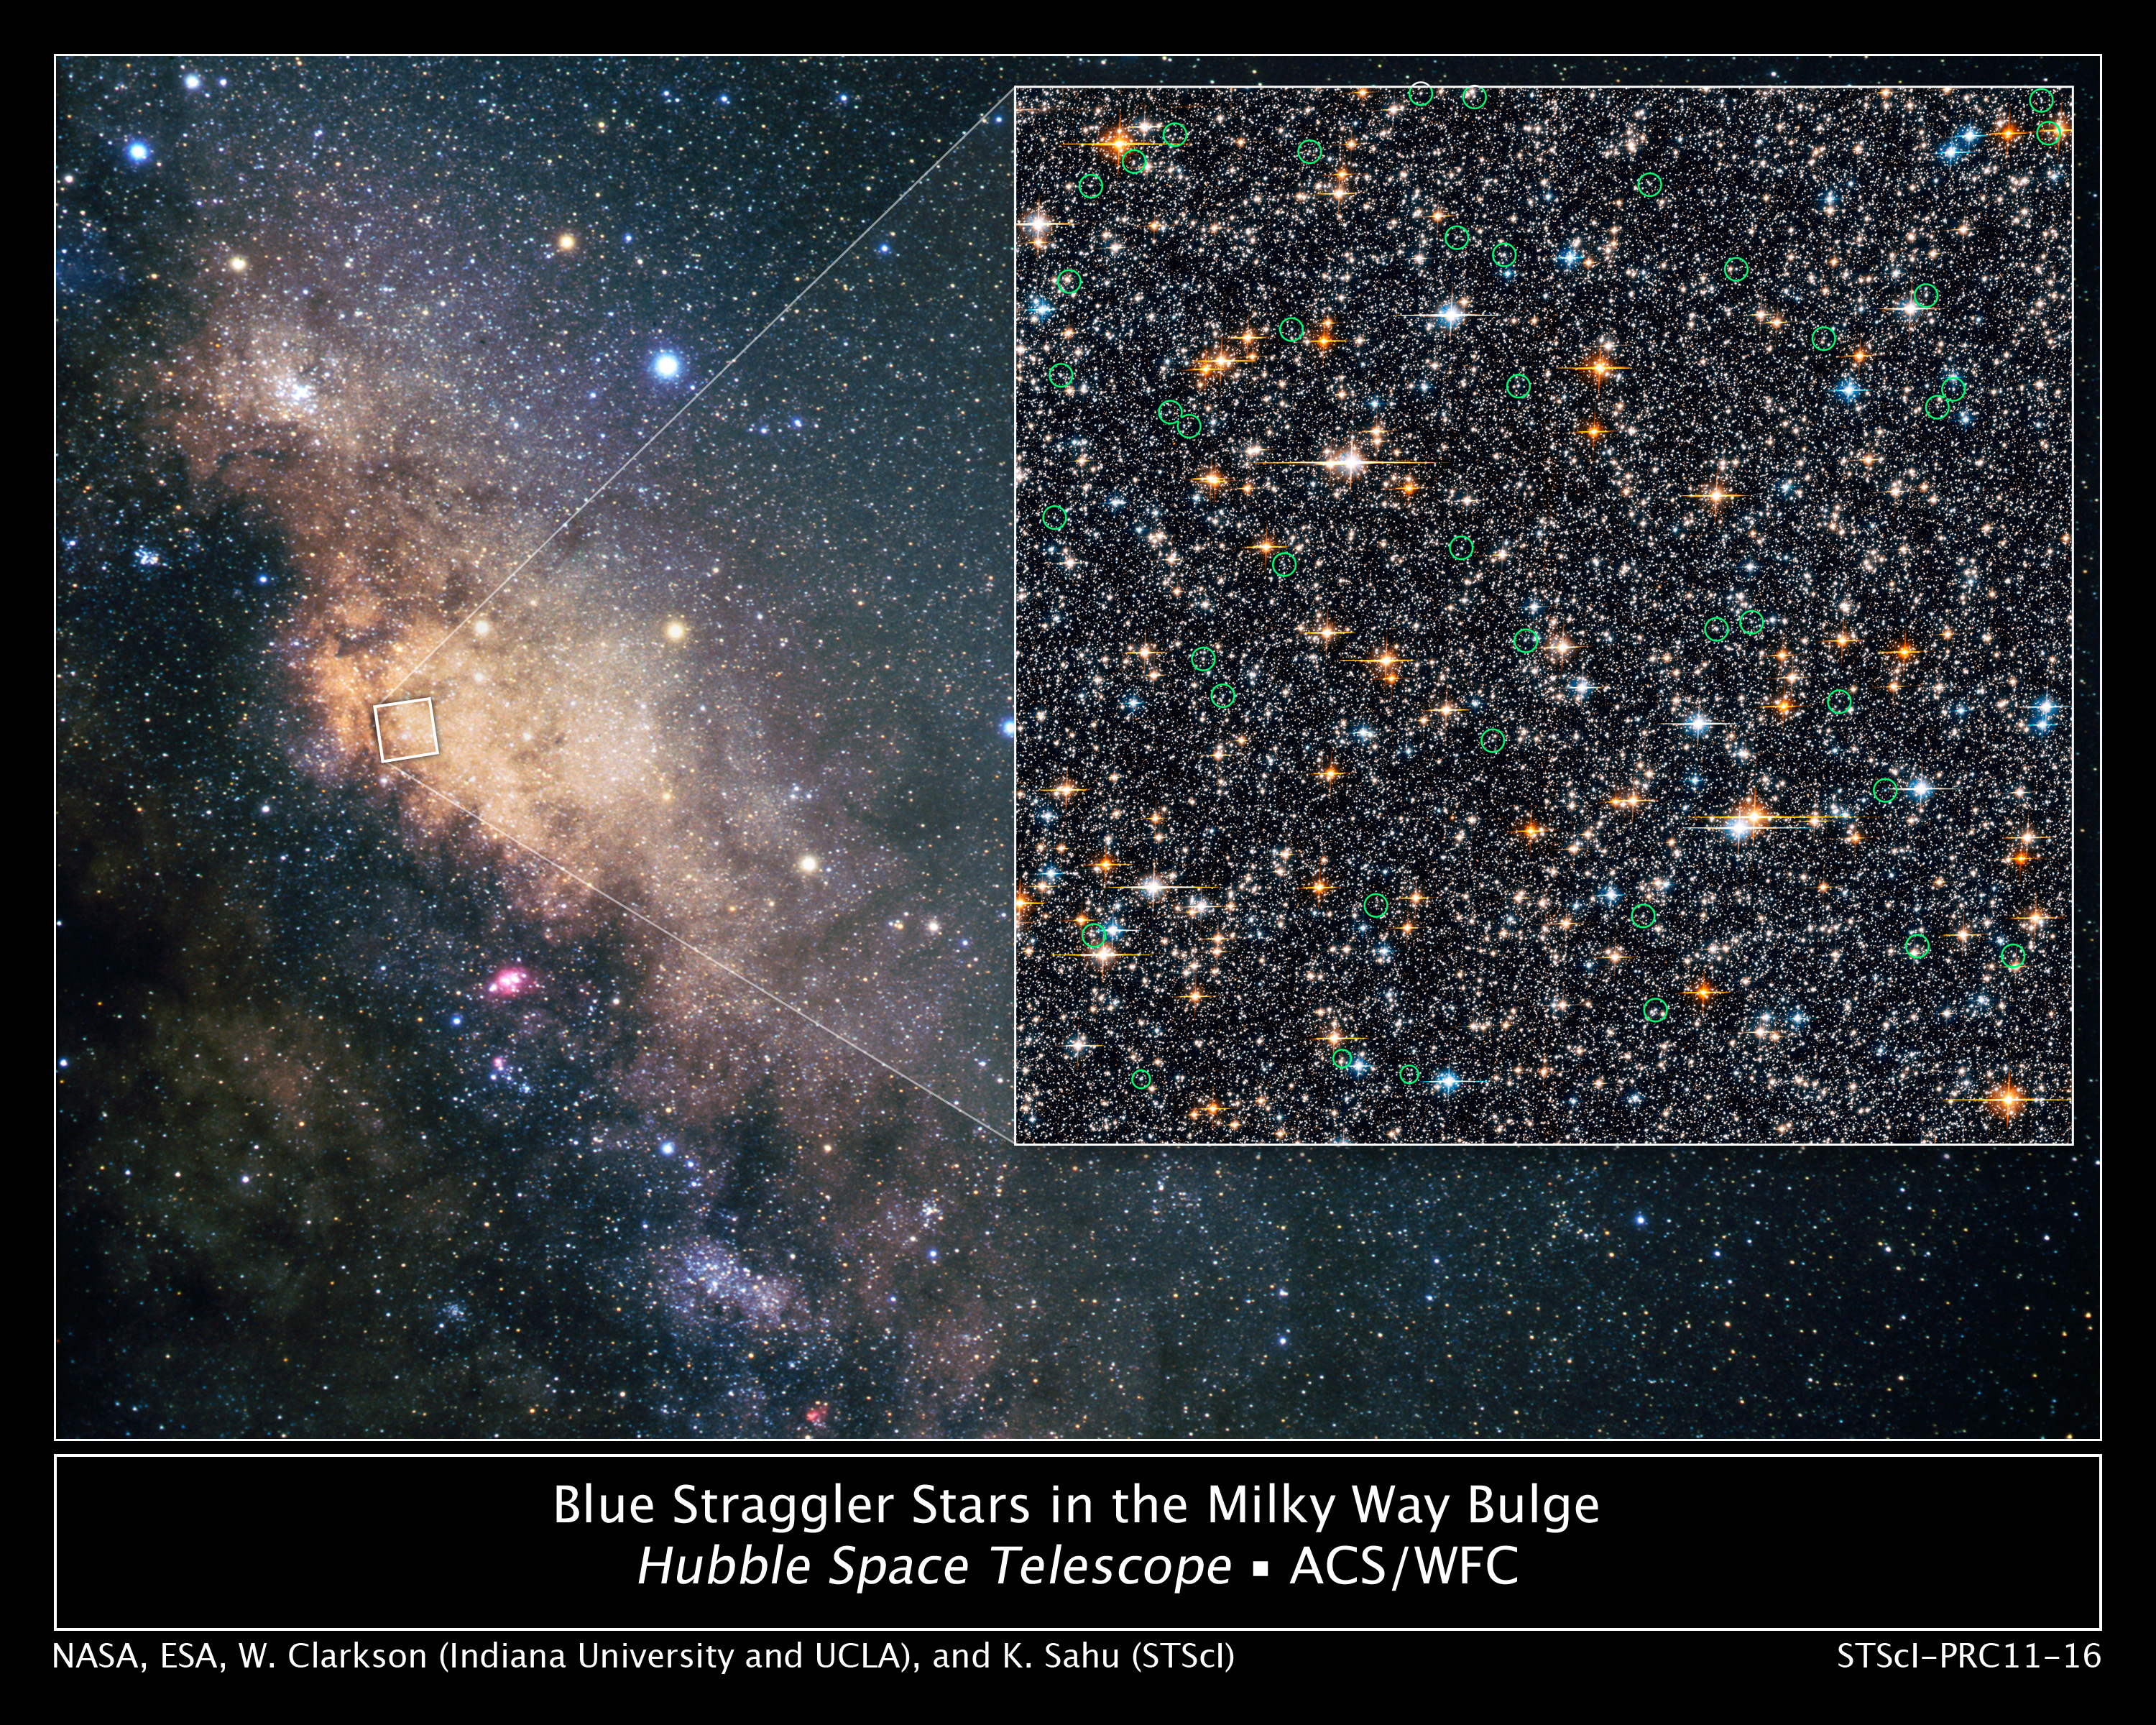

Hubble finds blue straggler stars in the galactic bulge

Peering deep into the star-filled, ancient hub of our Milky Way (left), the Hubble Space Telescope has found a rare class of oddball stars called blue stragglers, the first time such objects have been detected within our galaxy's bulge.

Blue stragglers — so named because they seem to be lagging behind in their rate of aging compared with the population from which they formed — were first found inside ancient globular star clusters half a century ago.

This discovery is a spin-off from a seven-day-long survey conducted in 2006 called the Sagittarius Window Eclipsing Extrasolar Planet Search (SWEEPS). Hubble peered at and obtained variability information for 180,000 stars in the crowded central bulge of our galaxy, 26,000 light-years away. The picture at right shows the 42 blue straggler candidates circled in green.

Blue stragglers have long been suspected to be located in the bulge. Until now, it has never been proven because younger stars in the disk of our galaxy lie along the line-of-sight to the core, confusing and contaminating the view. But Hubble's view is so sharp that astronomers could distinguish the motion of the core population from foreground stars in the Milky Way.

It's not clear how blue stragglers form, or if there is more than one mechanism at work. A common idea is that two stars collide and merge. This stirs up hydrogen fuel and causes the resulting, more massive star to undergo nuclear fusion at a faster rate, causing it to burn hotter and bluer.

The visible-light observations were made with Hubble's Advanced Camera for Surveys.

Credit: NASA, ESA, W. Clarkson (Indiana University and UCLA) and K. Sahu (STScI)